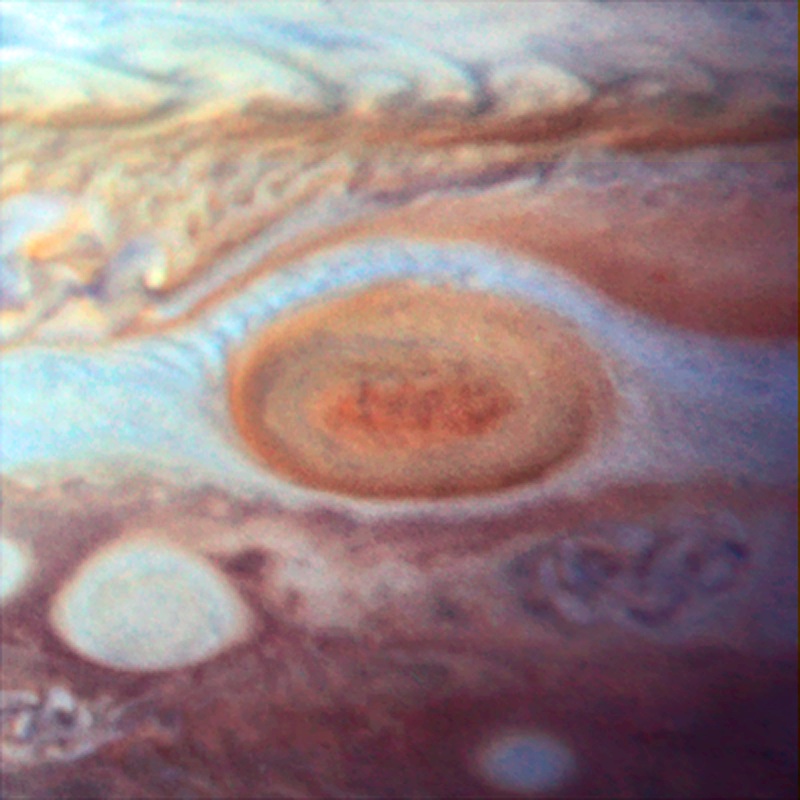

Jupiter's Great Red Spot in 1995

An image of Jupiter's Great Red Spot taken by Hubble's Wide Field Planetary Camera 2 in 1995. The spot's diameter here is just under 21 000km.

Credit: NASA, ESA and R. Beebe (NMSU)